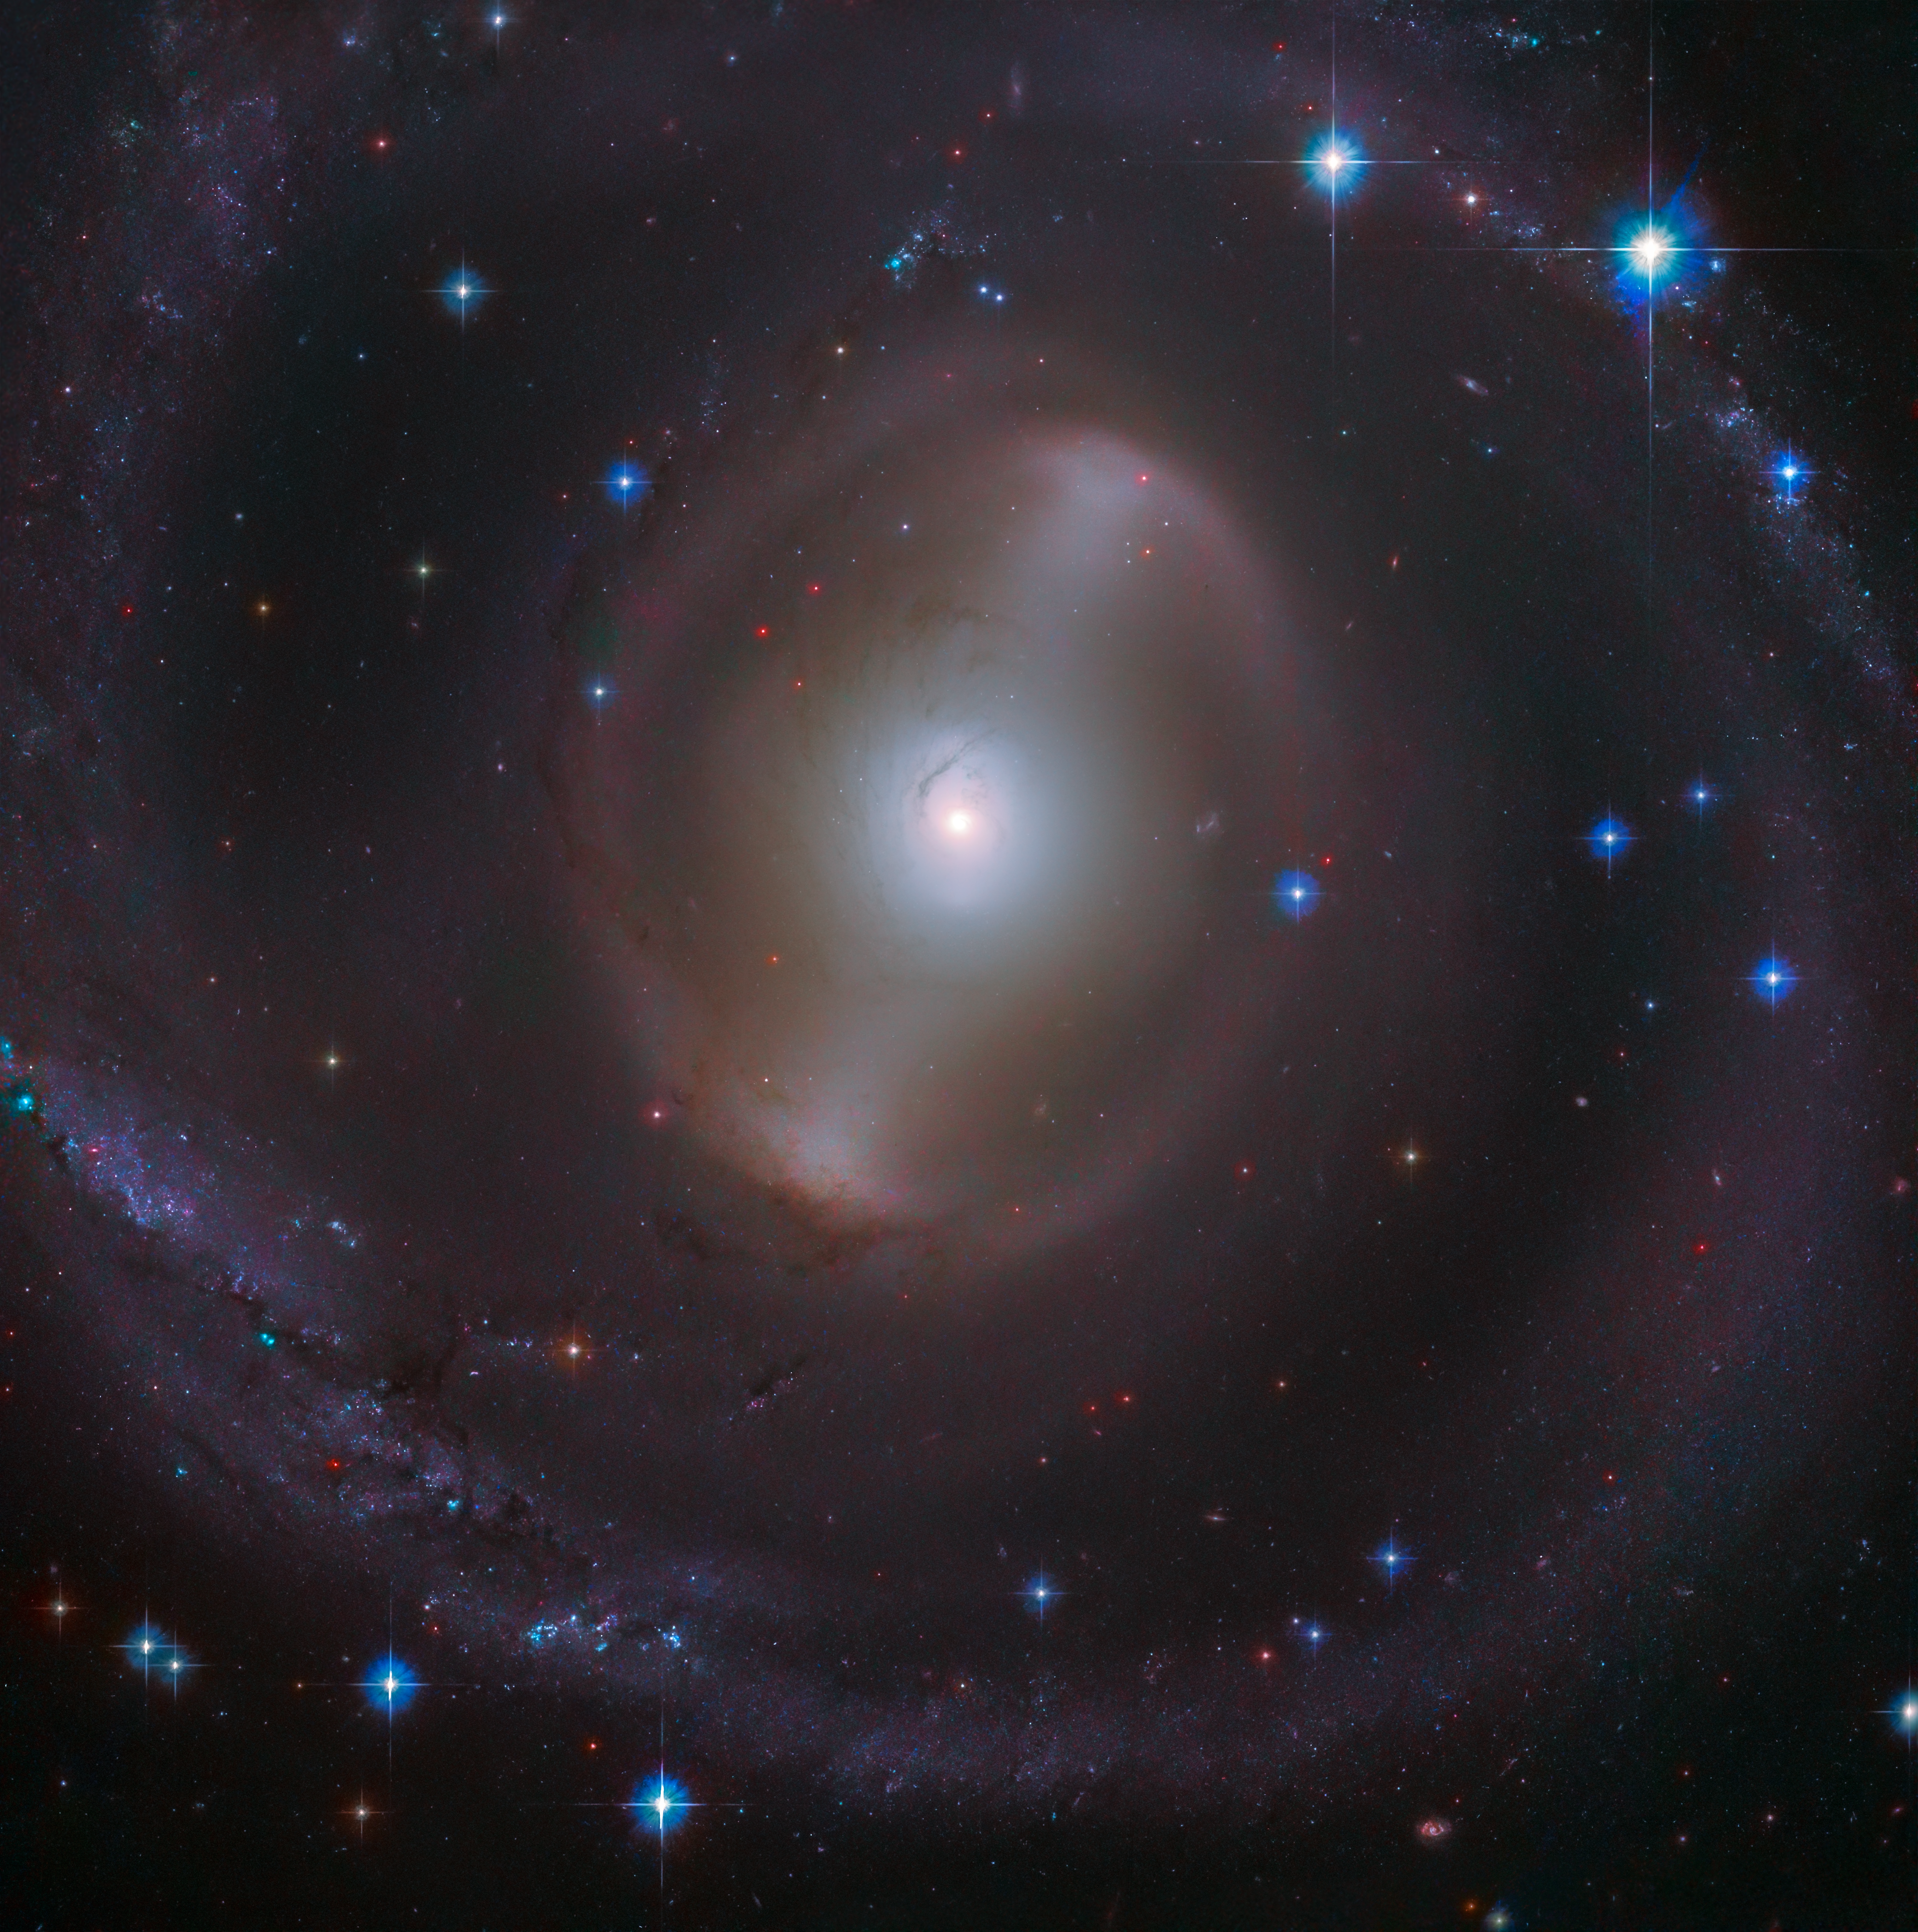

A Bright Bar of Light

The magnificent central bar of NGC 2217 (also known as AM 0619-271) shines bright in the constellation of Canis Major (The Greater Dog), in this new image taken by the NASA/ESA Hubble Space Telescope. Roughly 65 million light-years from Earth, this barred spiral galaxy is a similar size to our Milky Way at 100 thousand light-years across. Many stars are concentrated in its central region forming the luminous bar, surrounded by a set of tightly wound spiral arms.

The central bar in these types of galaxies plays an important role in their evolution, helping to funnel gas from the disc into the middle of the galaxy. The transported gas and dust are then either formed into new stars or fed to the supermassive black hole at the galaxy's centre. Weighing from a few hundred to over a billion times the mass of our Sun, supermassive black holes are present in almost all large galaxies.

This image was colourised with data from the Panoramic Survey Telescope and Rapid Response System (Pan-STARRS).

Credit: ESA/Hubble & NASA, J. Dalcanton Acknowledgement: Judy Schmidt (Geckzilla)